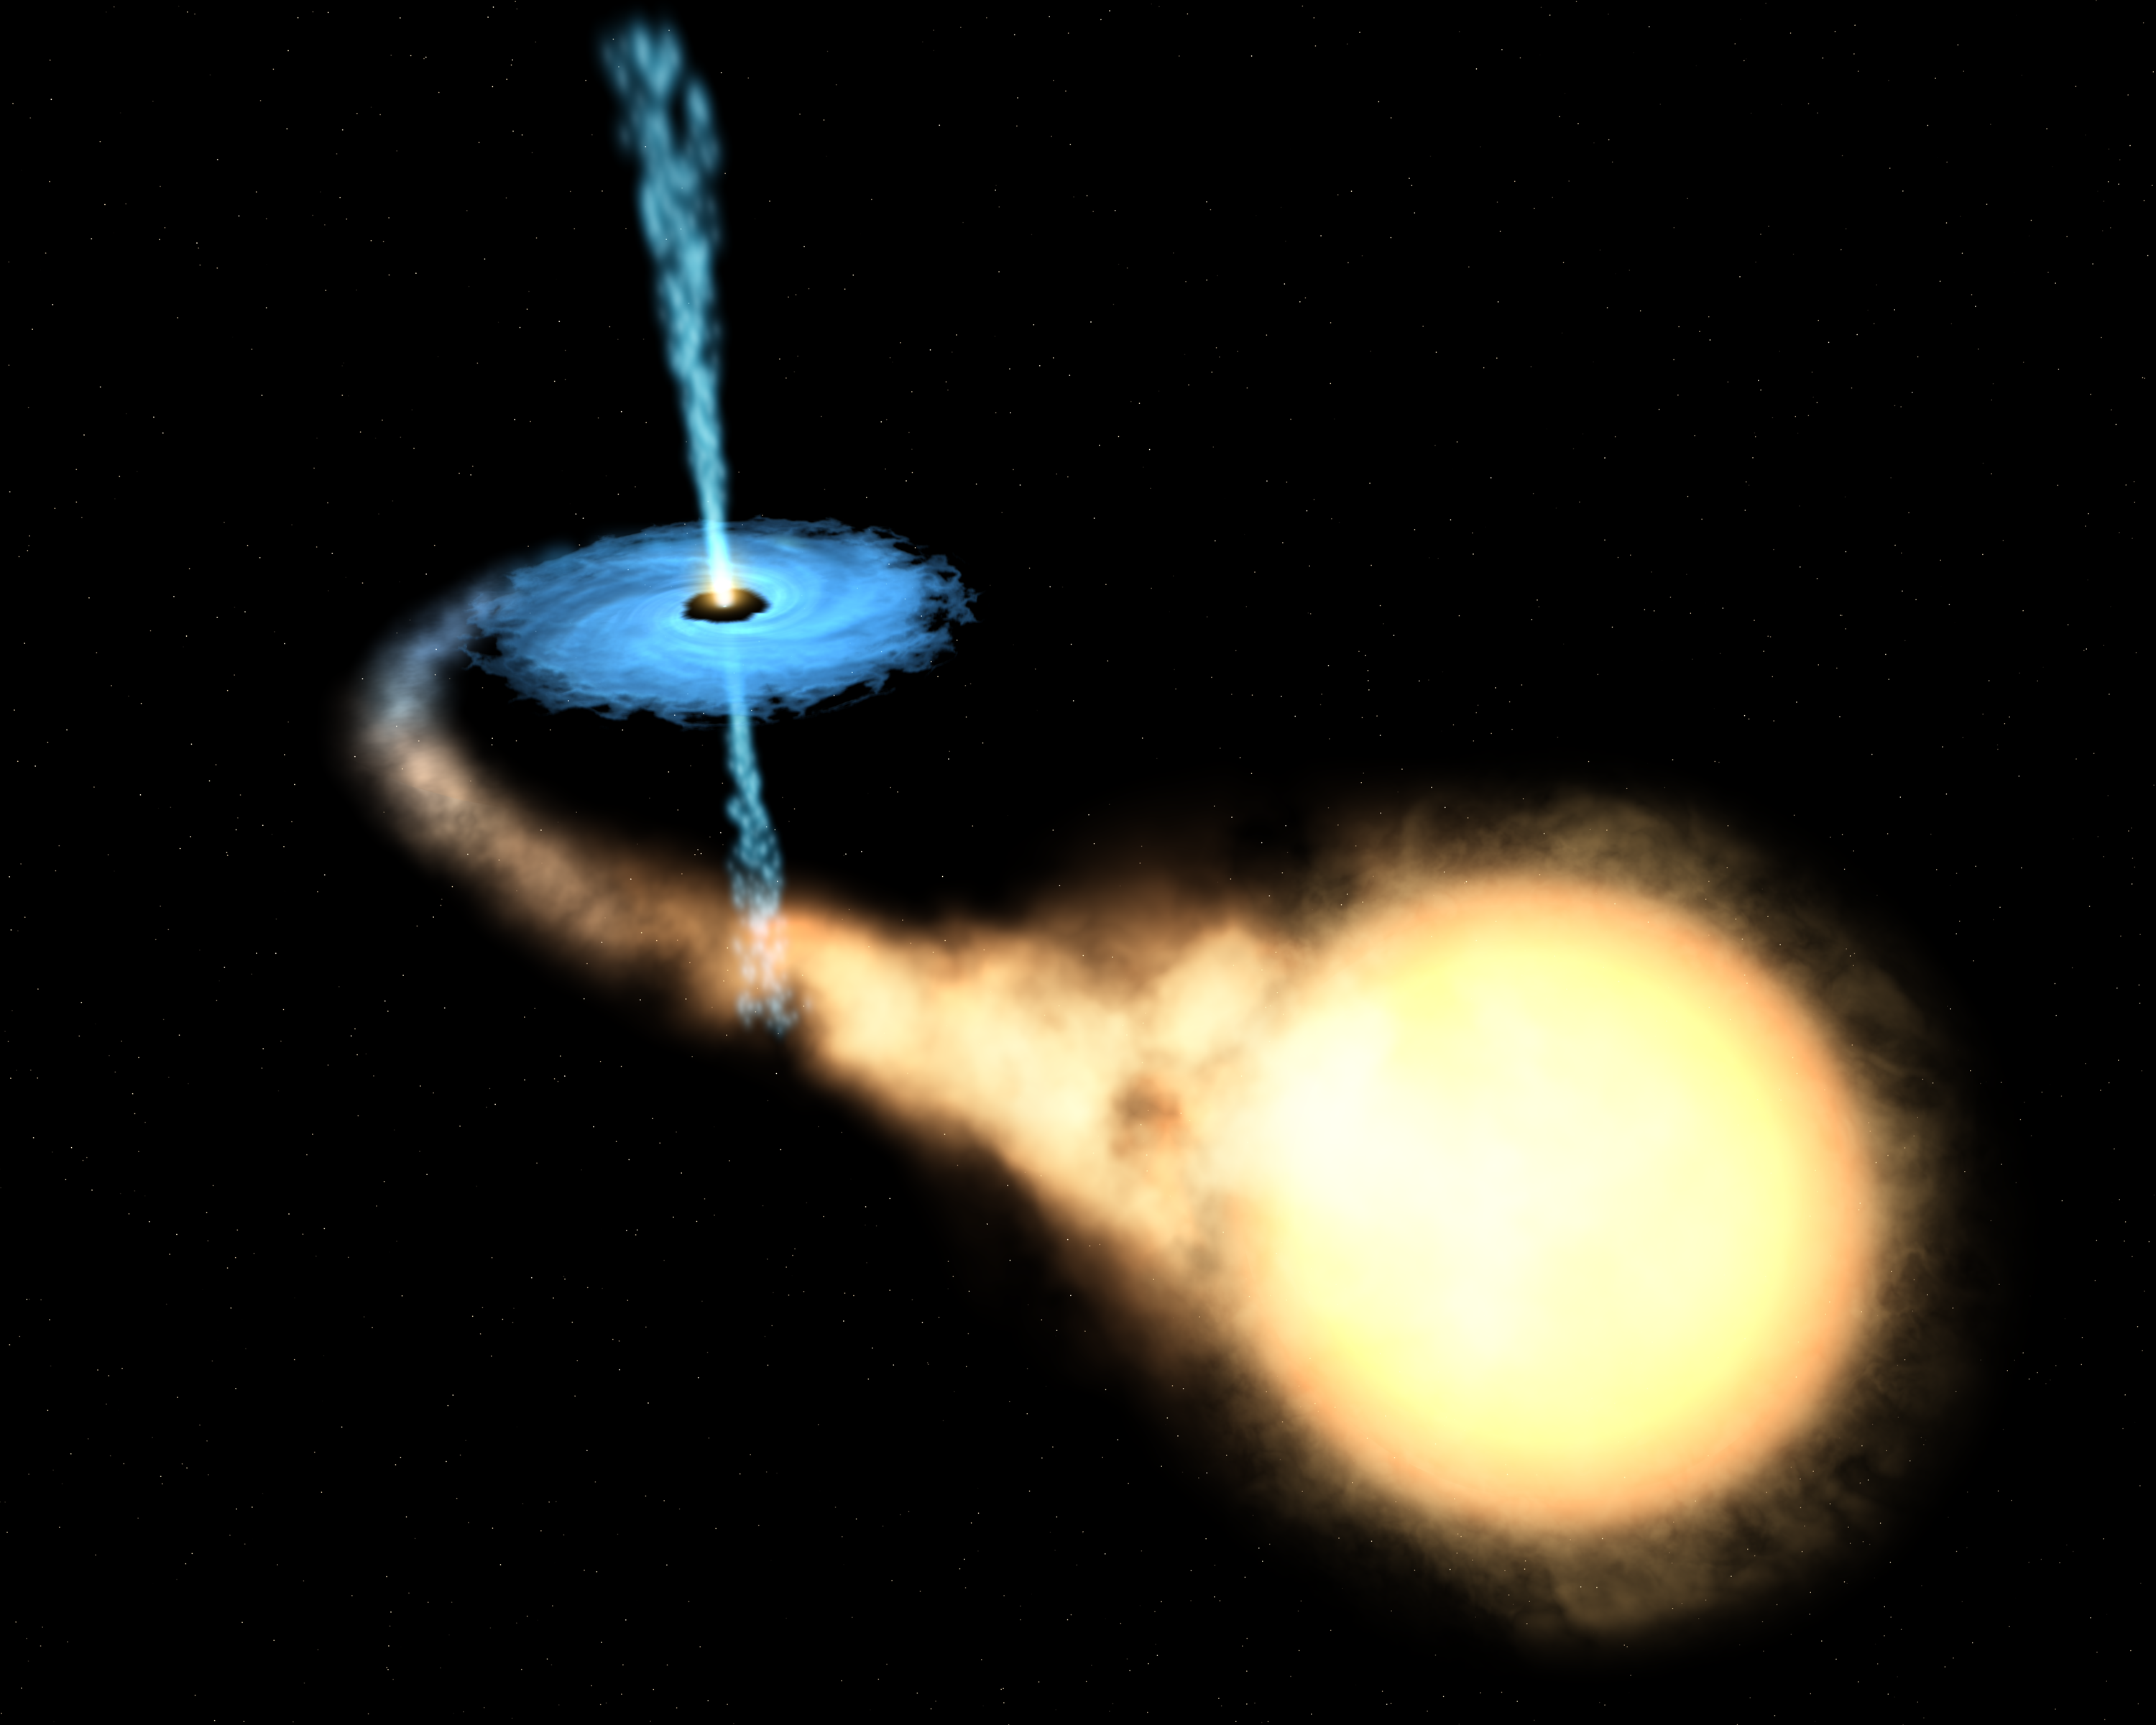

Microquasar GRO J1655-40 (artist's impression)

GRO J1655-40 is the second so-called 'microquasar' discovered in our Galaxy. Microquasars are black holes of about the same mass as a star. They behave as scaled-down versions of much more massive black holes that are at the cores of extremely active galaxies, called quasars. Astronomers have known about the existence of stellar-mass black holes since the early 1970s. Their masses can range from 3.5 to approximately 15 times the mass of our Sun. Using Hubble data, astronomers were able to describe the black-hole system. The companion star had apparently survived the original supernova explosion that created the black hole. It is an ageing star that completes an orbit around the black hole every 2.6 days. It is being slowly devoured by the black hole. Blowtorch-like jets (shown in blue) are streaming away from the black-hole system at 90% of the speed of light.

Credit: European Space Agency, NASA and Felix Mirabel (the French Atomic Energy Commission & the Institute for Astronomy and Space Physics/Conicet of Argentina)